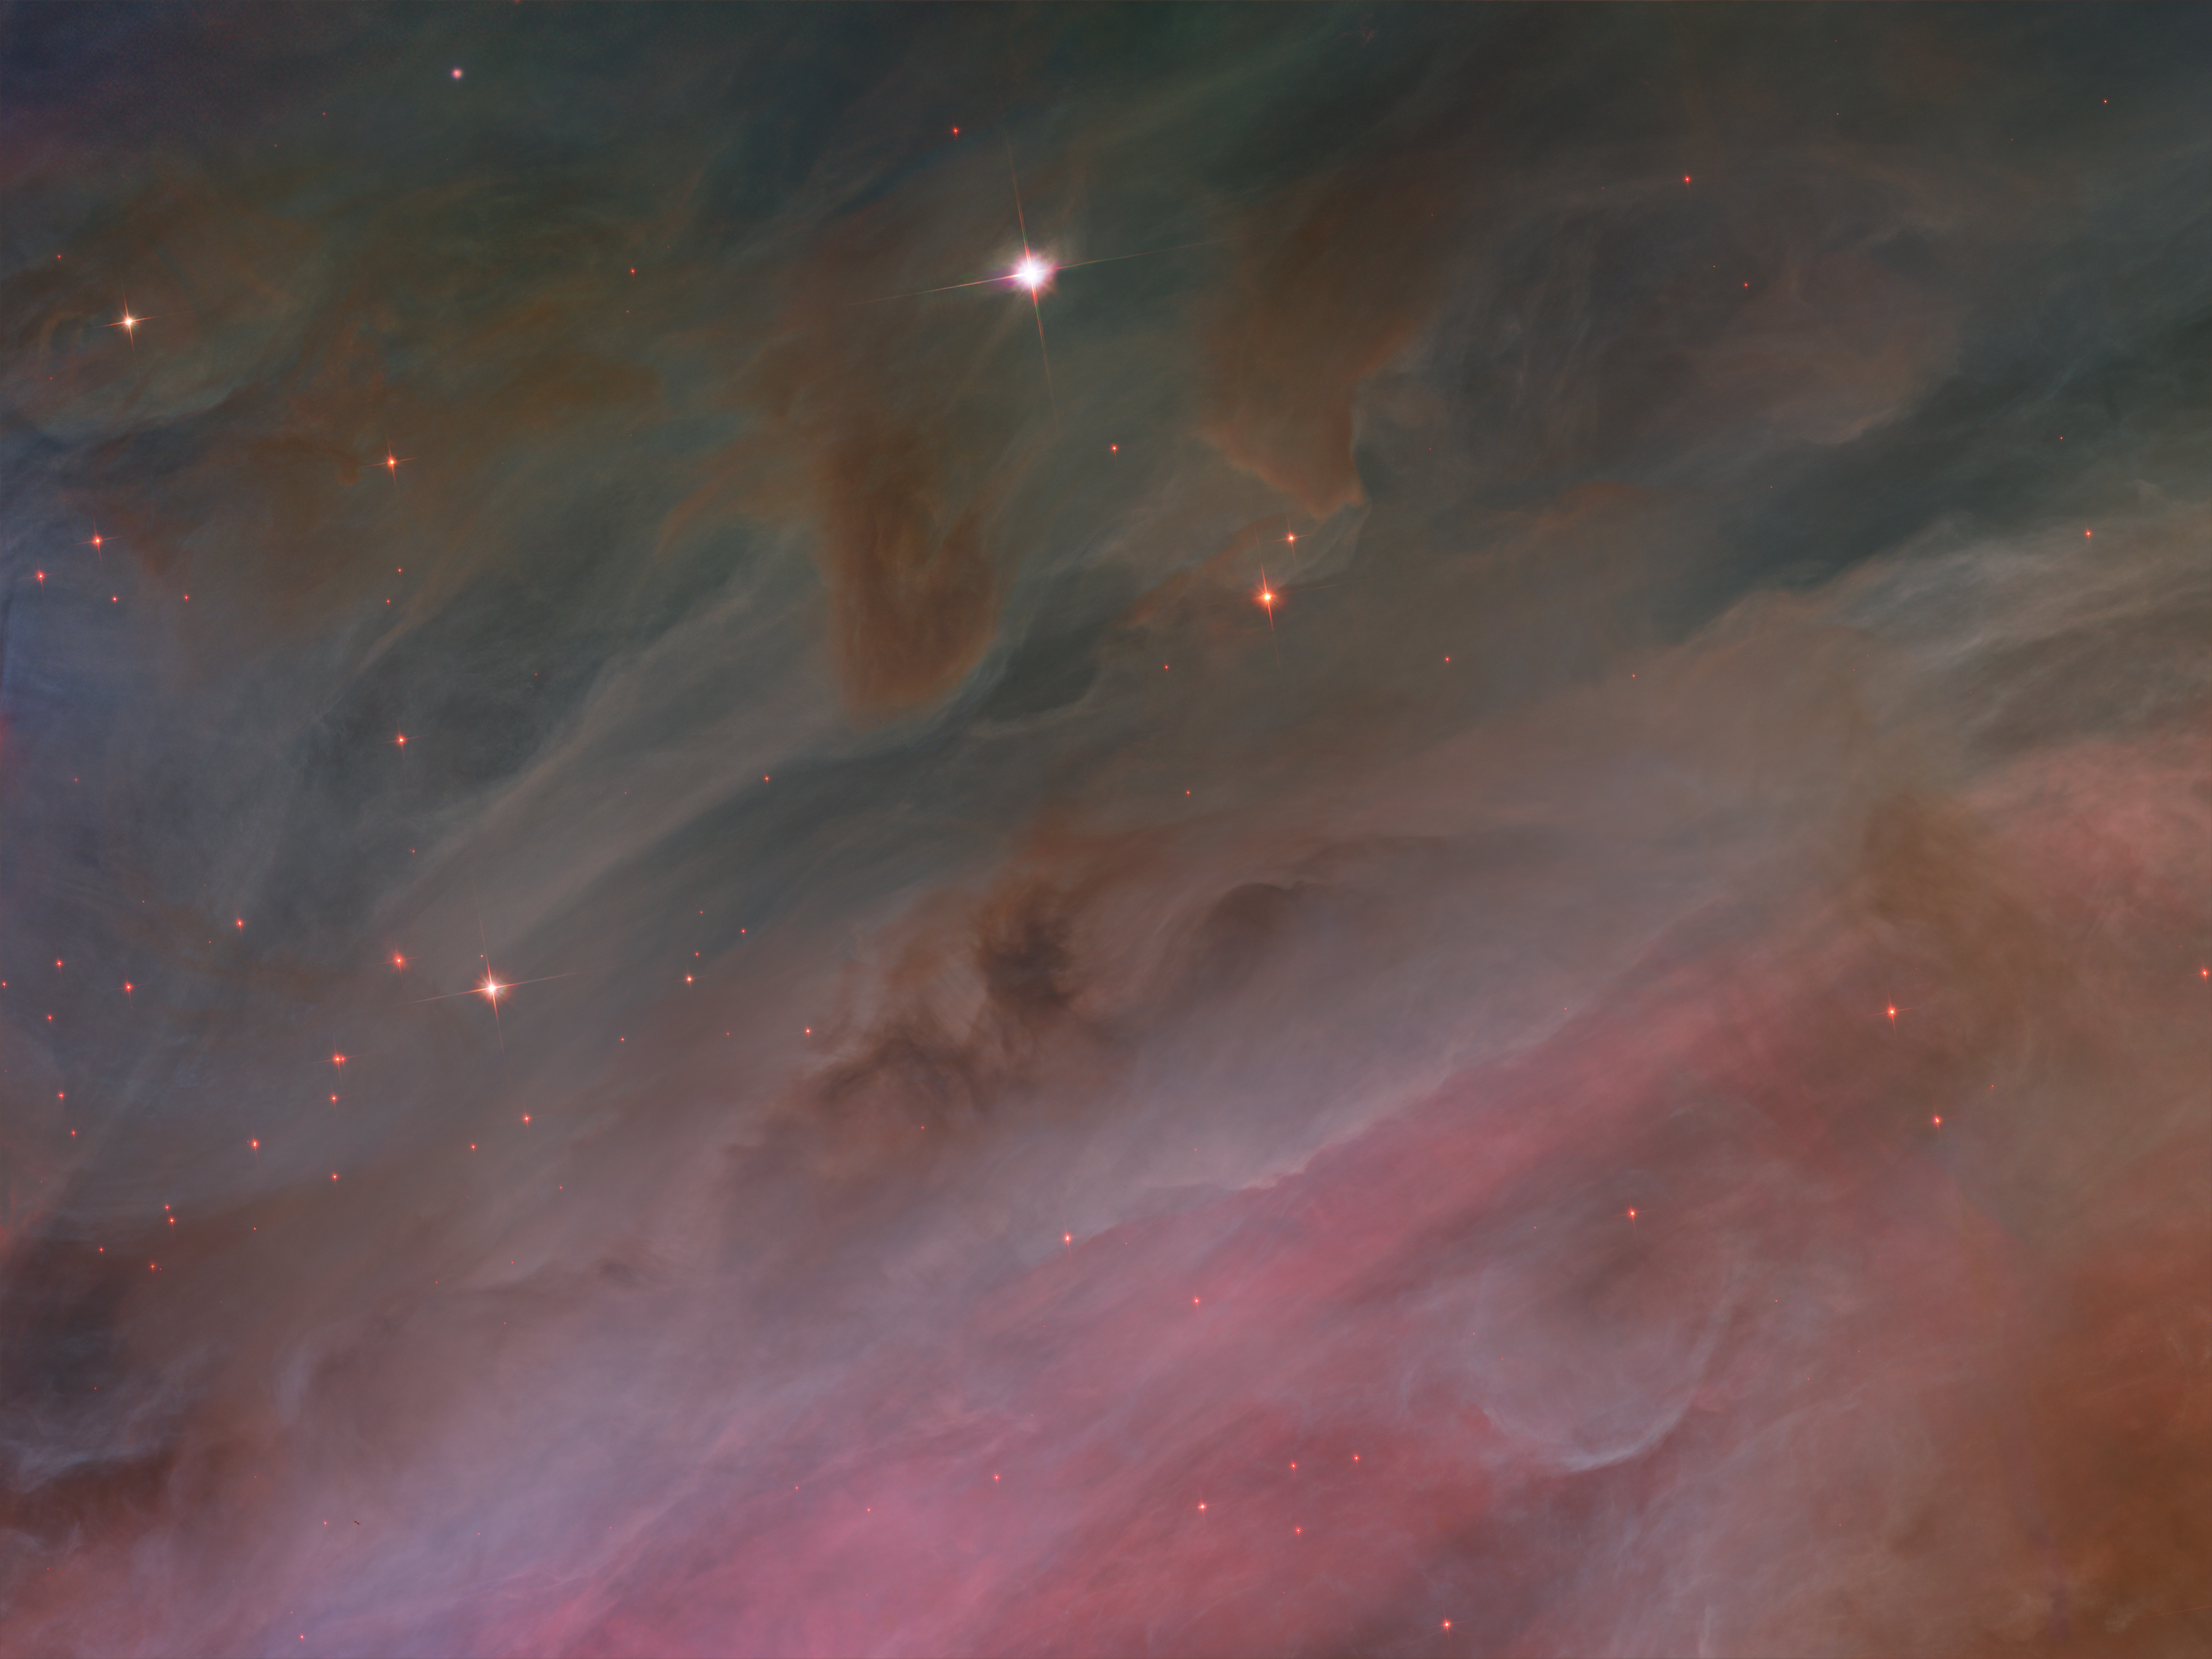

Pillars of gas

These dense, dark pillars of dust and gas are resisting erosion from intense ultraviolet light released by the Orion Nebula's biggest stars.

Credit: NASA, ESA, M. Robberto ( Space Telescope Science Institute/ESA) and the Hubble Space Telescope Orion Treasury Project Team